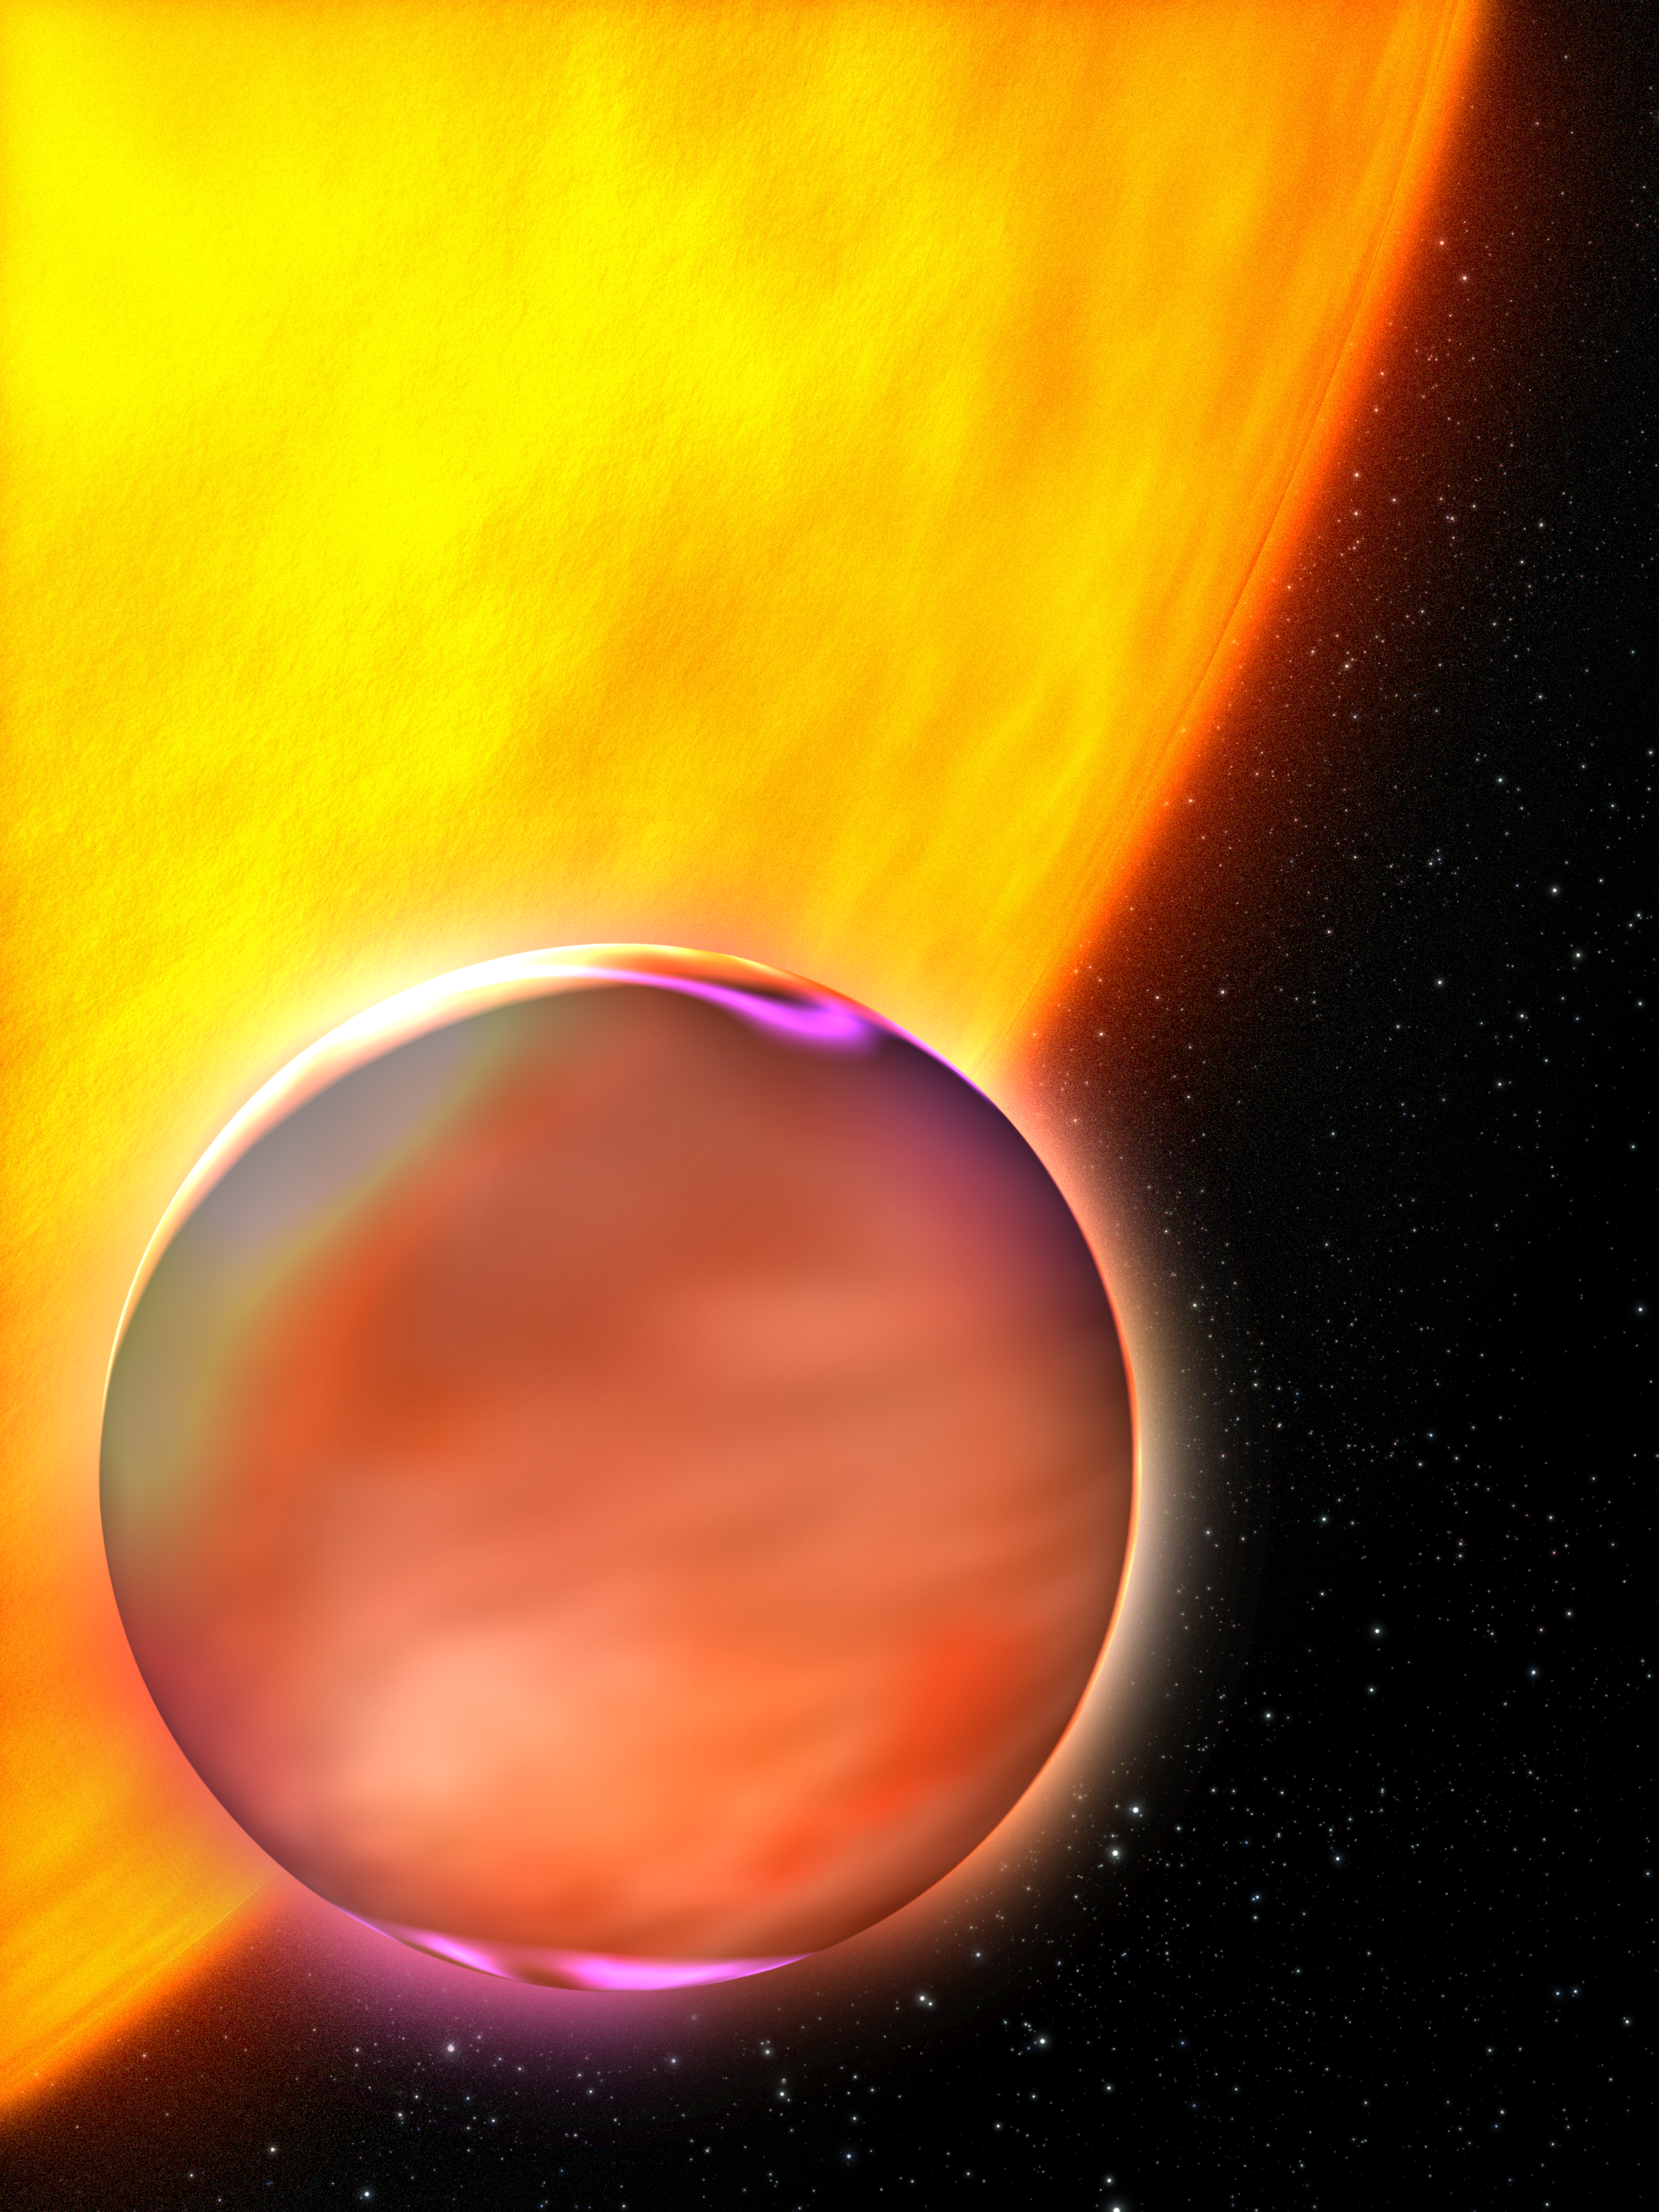

Artist's concept of extrasolar planet's Hazy atmosphere

This is an artist's concept of HD 189733b and its parent star.

Credit: NASA, ESA, and G. Bacon (STScI)